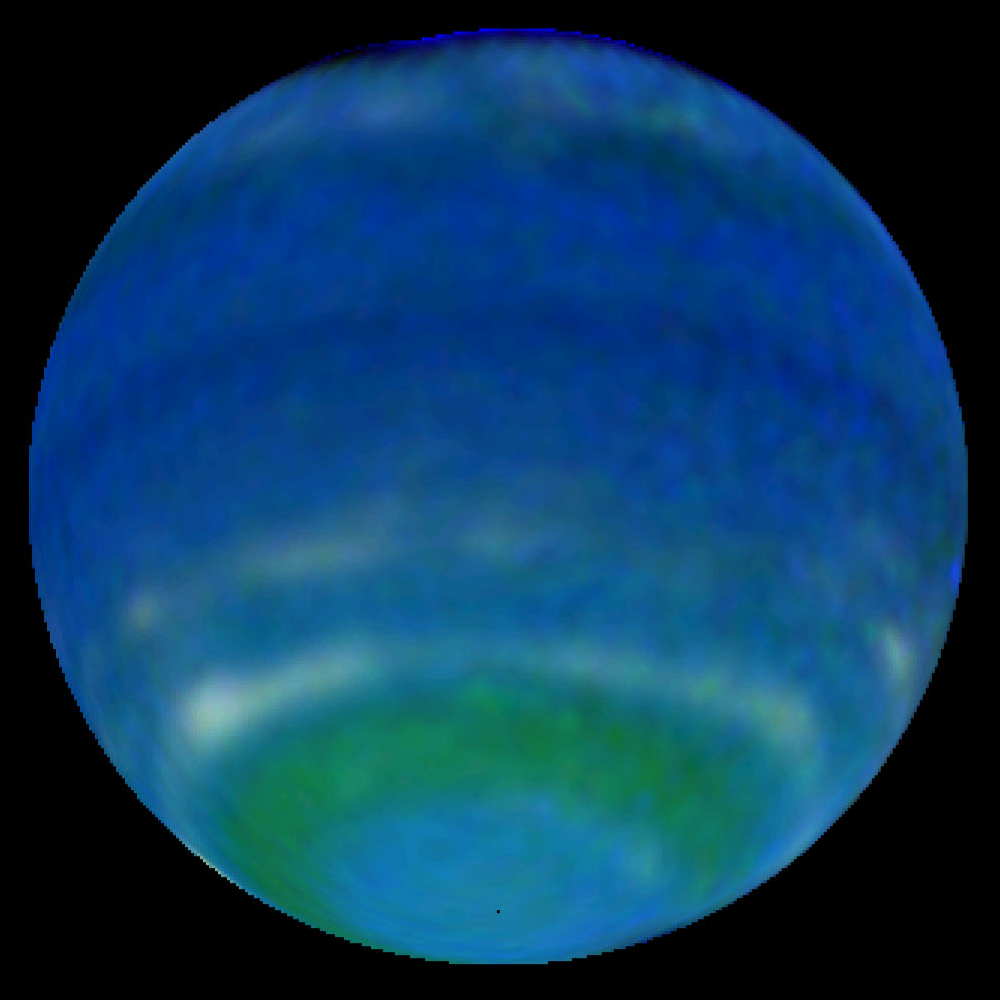

Springtime on Neptune - 1998 Image of Neptune

Springtime is blooming on Neptune! This might sound like an oxymoron because Neptune is the farthest and coldest of the major planets. But observations by NASA's Hubble Space Telescope reveal an increase in Neptune's brightness in the southern hemisphere. Astronomers consider this increase a harbinger of seasonal change.

Credit: NASA/ESA, L. Sromovsky, and P. Fry (University of Wisconsin-Madison)